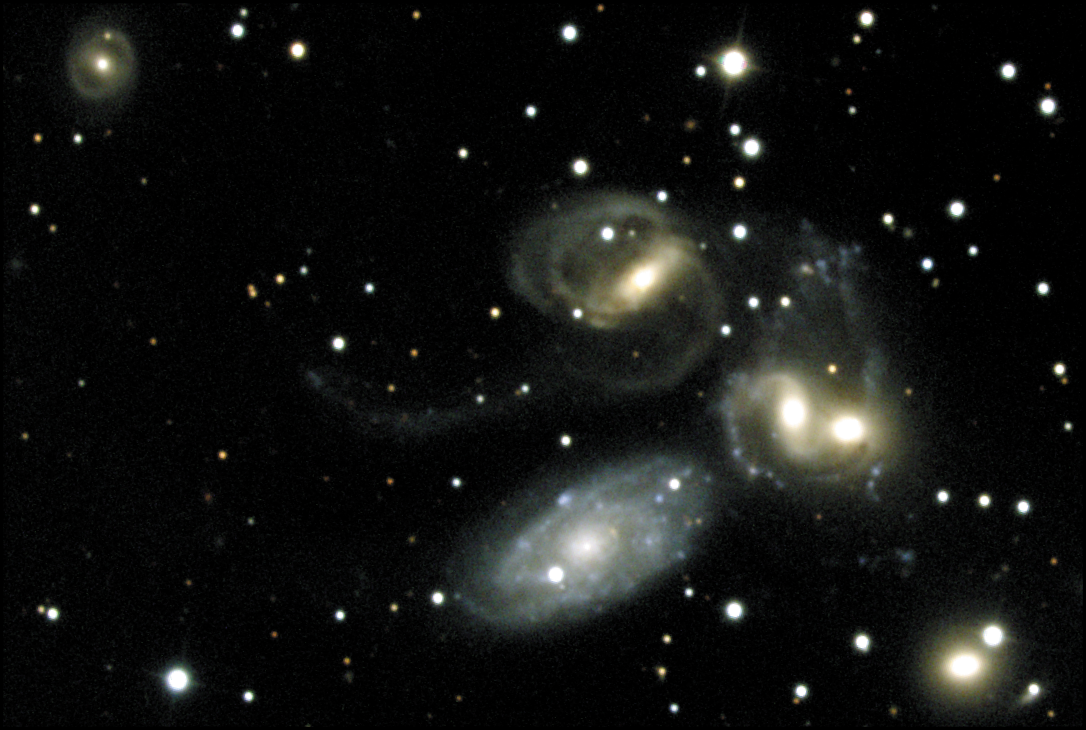

Stephan's Quintet - A Mammoth Cosmic Collision (Ground-based view)

Ground-based overview of Stephan's Quintet taken at the Kitt Peak National Observatory's 0.9-meter telescope in October of 1998 by Nigel Sharp. North is up, east is to the left.

Credit: N.A.Sharp/AURA/NOAO/NSF